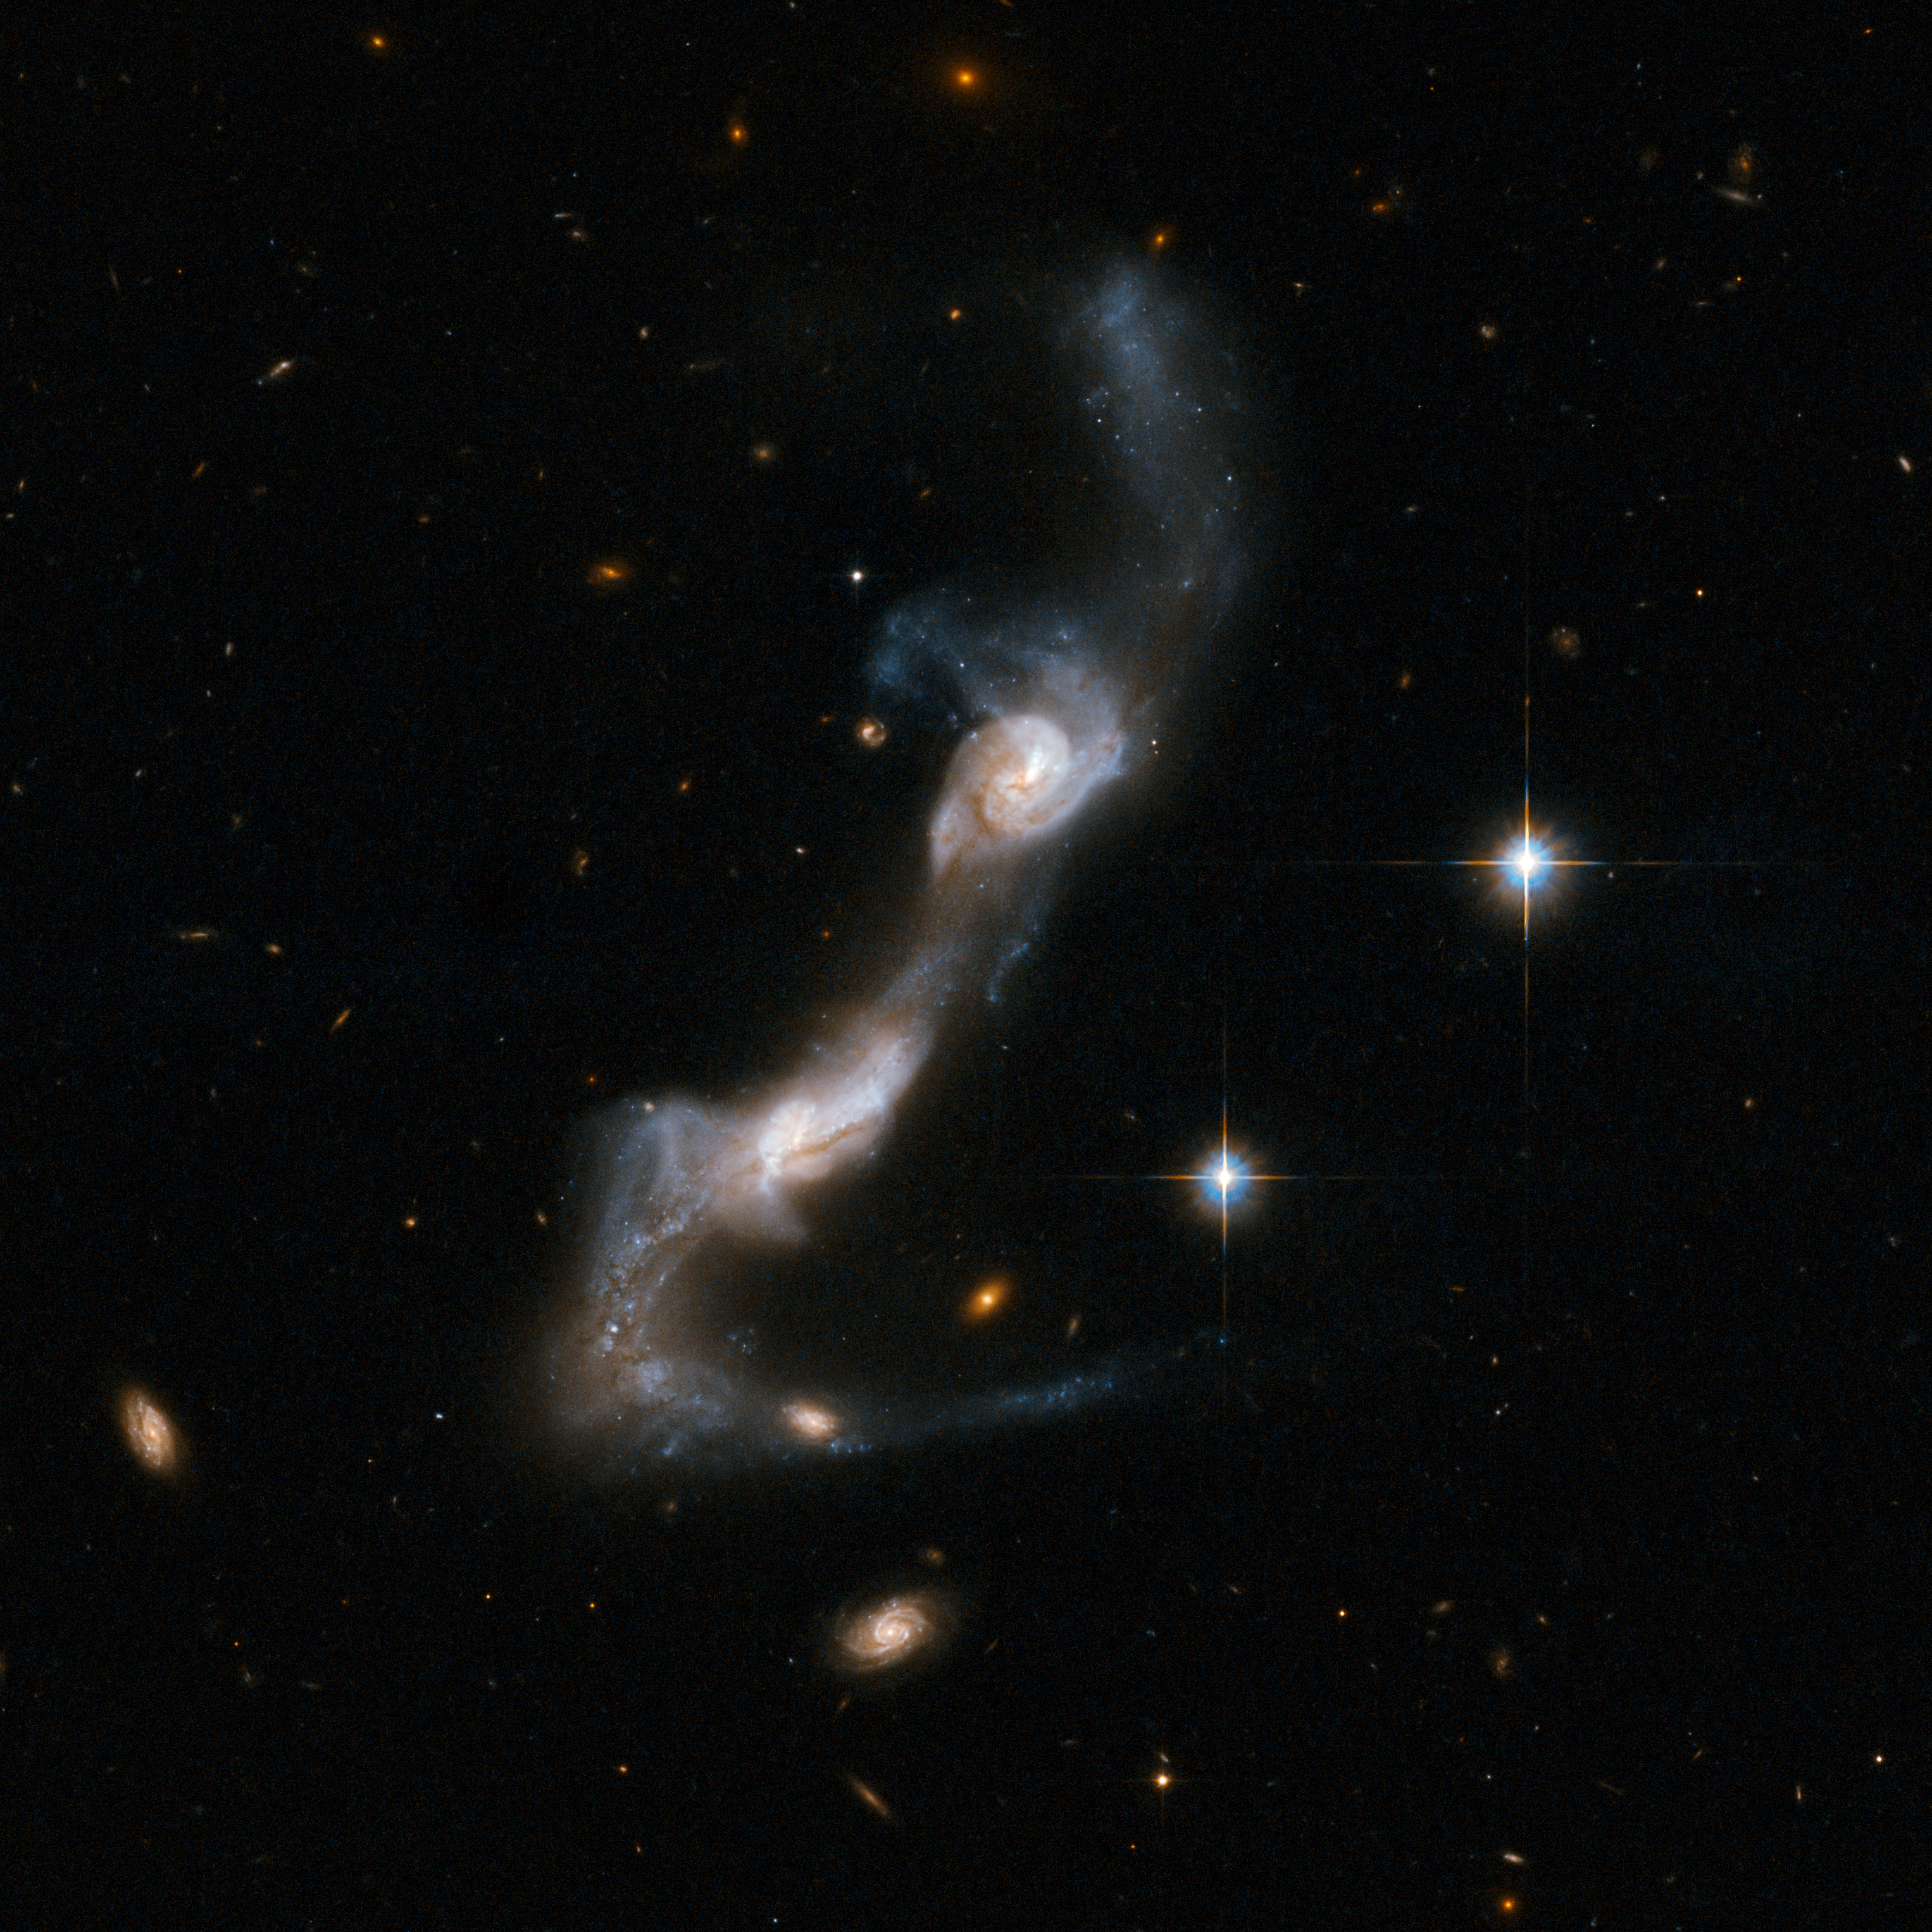

UGC 8335

UGC 8335 is a strongly interacting pair of spiral galaxies resembling two ice skaters. The interaction has united the galaxies via a bridge of material and has yanked two strongly curved tails of gas and stars from the outer parts of their "bodies". Both galaxies show dust lanes in their centres. UGC 8335 is located in the constellation of Ursa Major, the Great Bear, about 400 million light-years from Earth. It is the 238th galaxy in Arp's Atlas of Peculiar Galaxies.

This image is part of a large collection of 59 images of merging galaxies taken by the Hubble Space Telescope and released on the occasion of its 18th anniversary on 24th April 2008.

Credit: NASA, ESA, the Hubble Heritage Team (STScI/AURA)-ESA/Hubble Collaboration and A. Evans (University of Virginia, Charlottesville/NRAO/Stony Brook University)